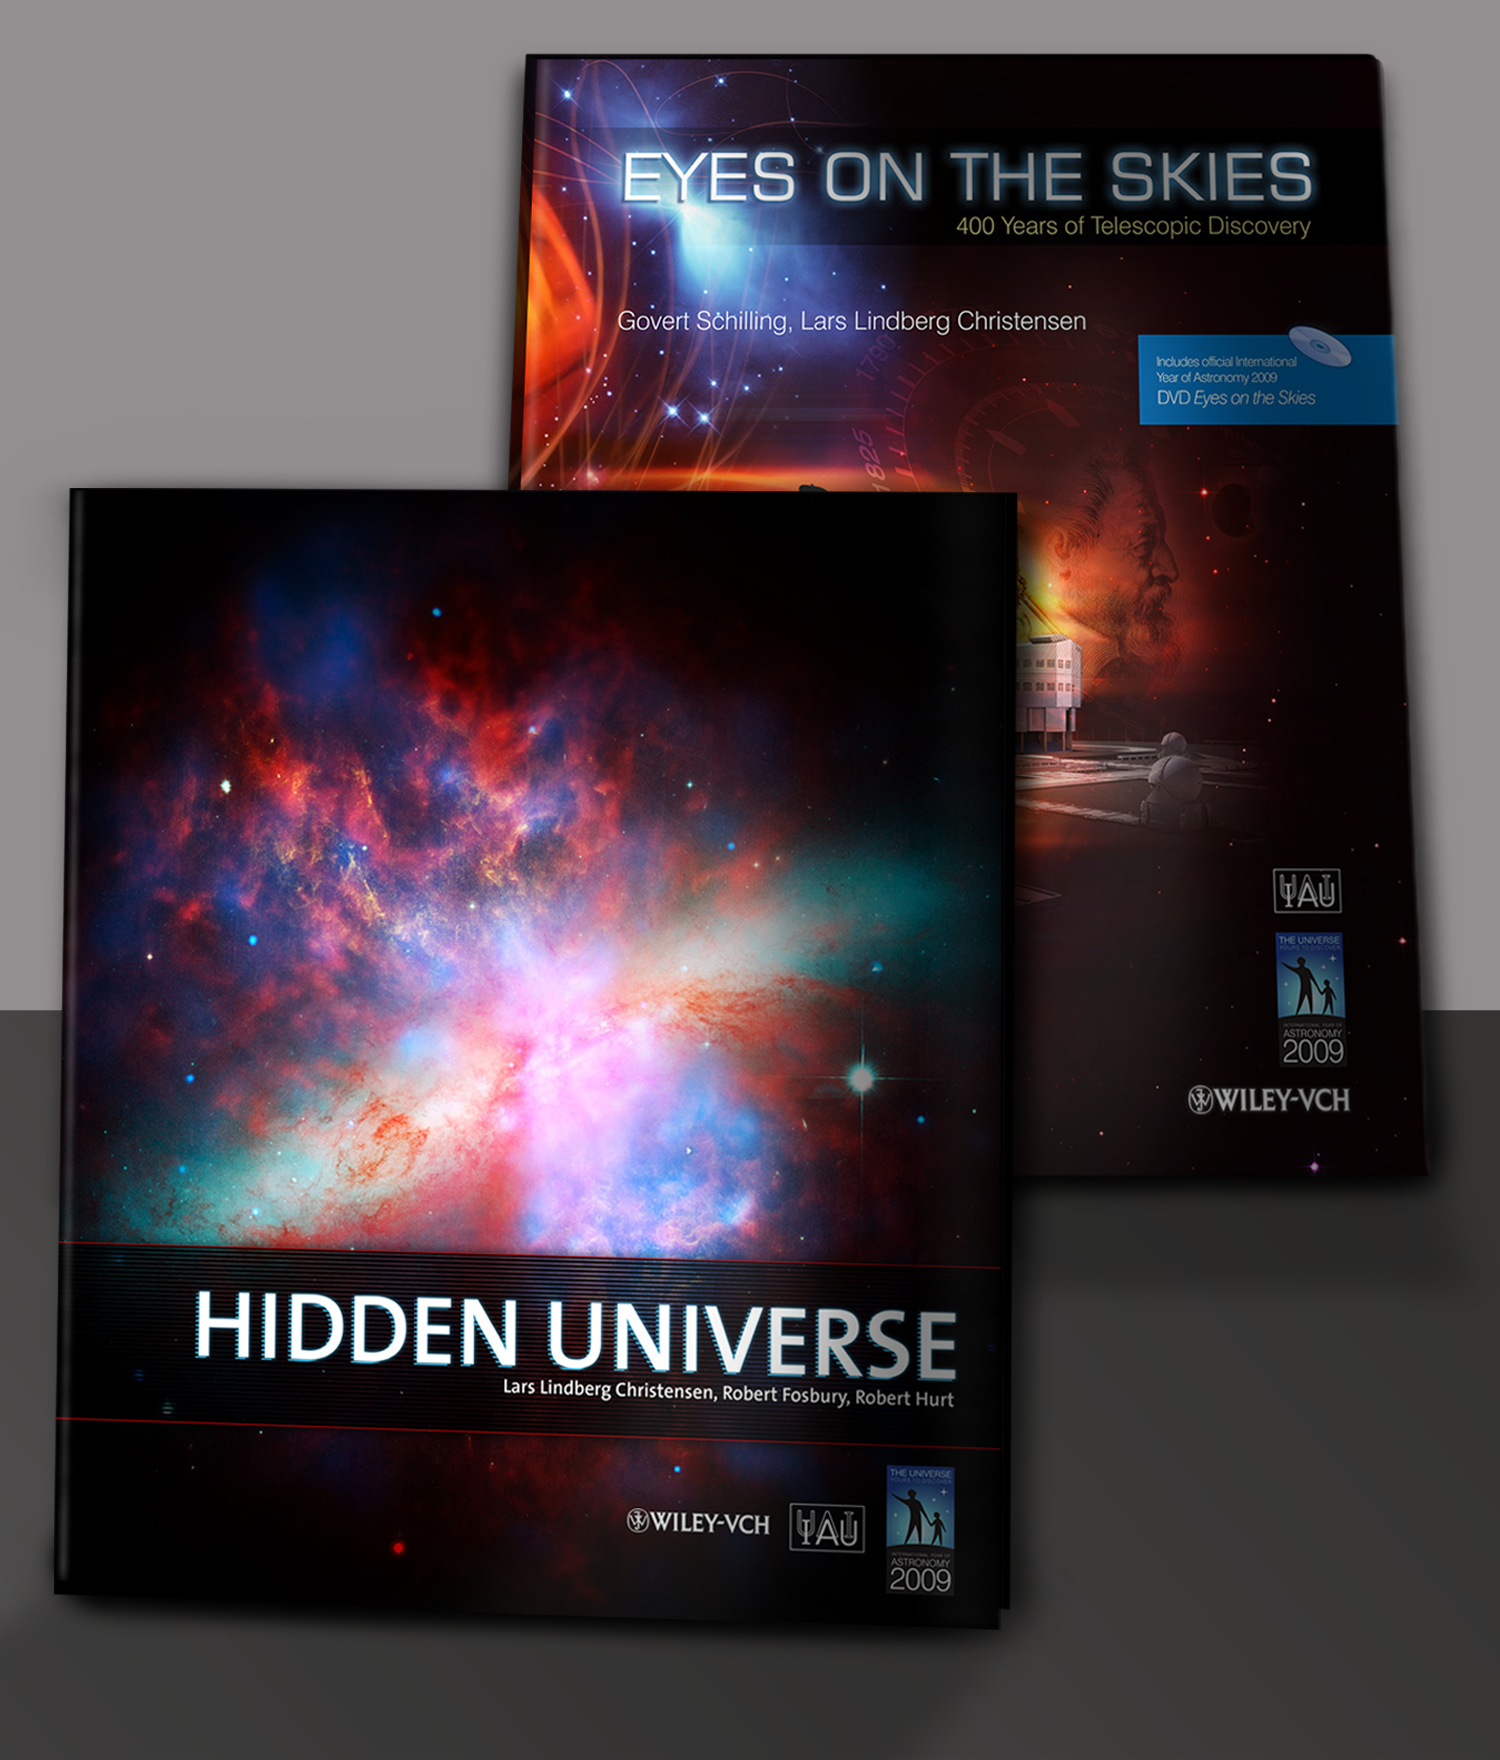

"Eyes on the Skies" and "Hidden Universe" are Wiley-VCH bestsellers

"Eyes on the Skies" and "Hidden Universe", two books produced in a unique collaboration between the International Astronomical Union (IAU), the European Southern Observatory, the European Space Agency and the international publisher Wiley-VCH, have just been announced as 2008 bestsellers. The publisher's second ranking bestseller is "Eyes on the Skies", which tells the fascinating story of the telescope through words and a wealth of stunning photographs and illustrations (plus a 60-minute documentary DVD). In 8th place, "Hidden Universe" achieves the tricky task of communicating unseen phenomena comprehensively and without jargon, beginning with a look at the way we observe the Universe using our eyes and telescopes and then travelling across the five wavelength bands.

Both books are released at the occasion of the International Year of Astronomy 2009.

Credit: NASA & ESA